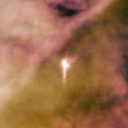

131-247

One of 42 new proplyds discovered in the Orion Nebula, 131-247 is one of the bright proplyds that lies relatively close to the nebula’s brightest star, Theta 1 Orionis C.

Credit: NASA/ESA and L. Ricci (ESO)